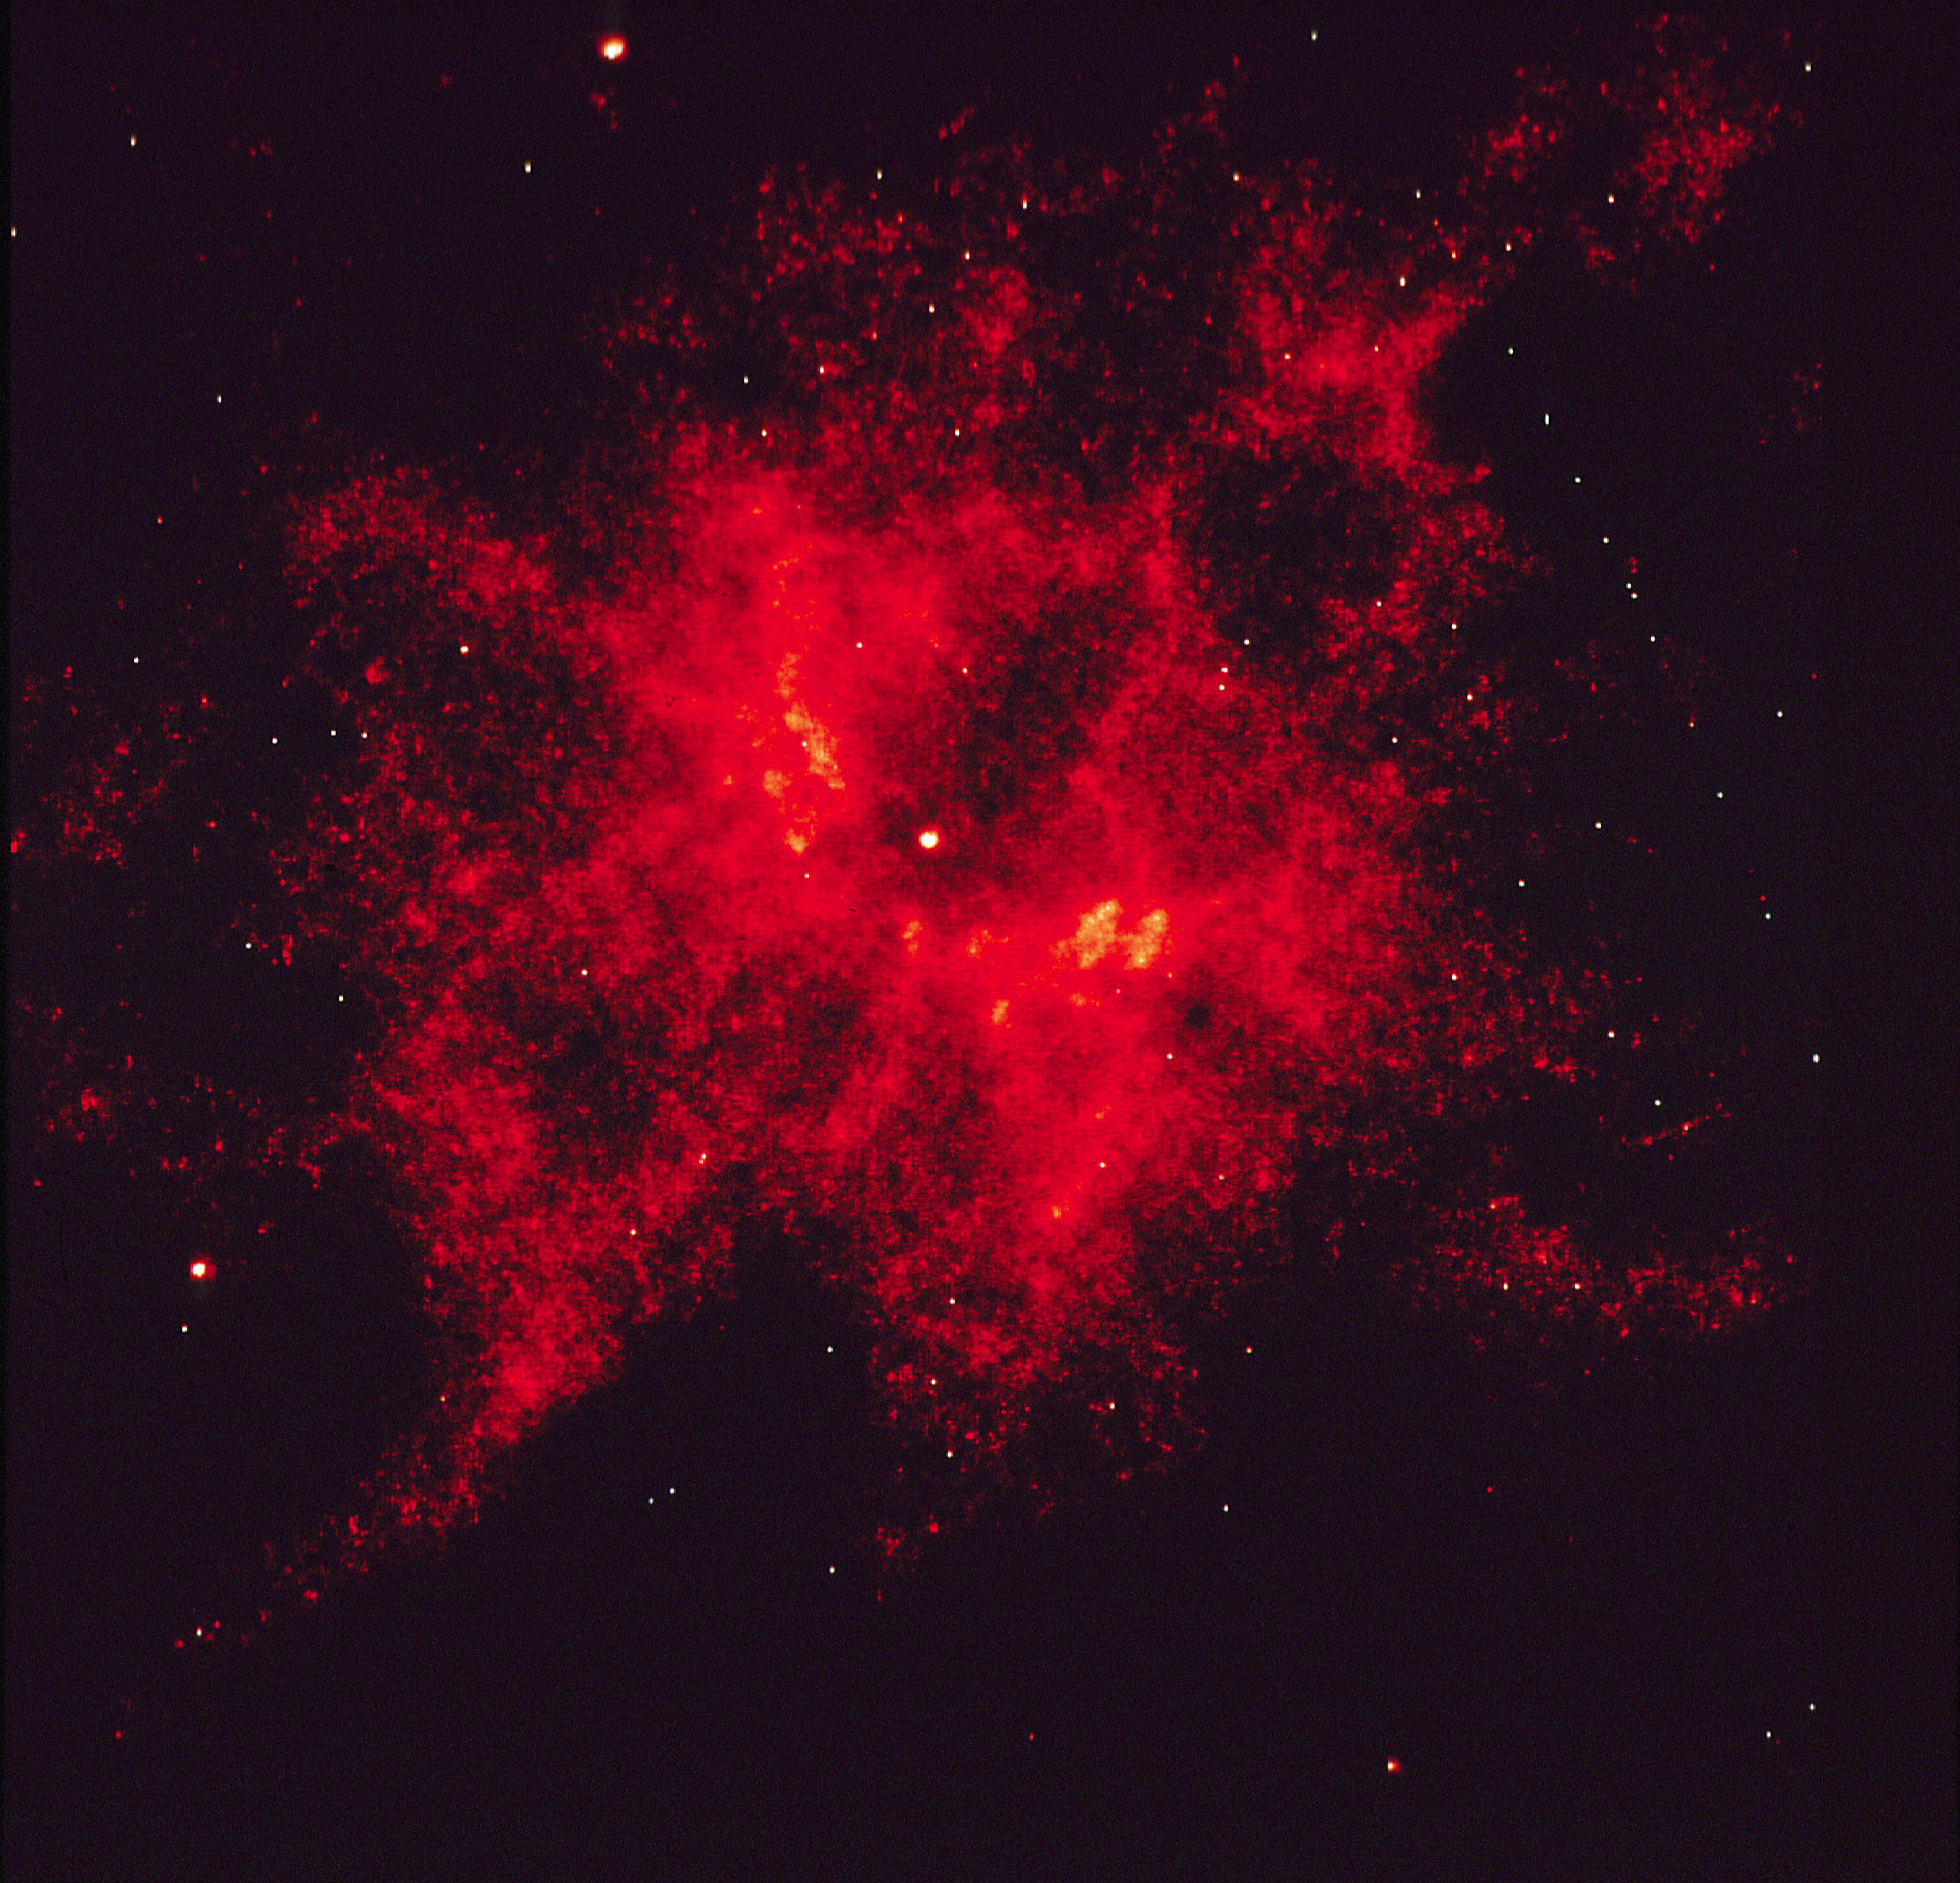

One of hottest known stars captured in Hubble photograph

This photograph from the NASA/ESA Hubble Space Telescope presents the first clear view of one of the hottest known stars, the central star of nebula NGC 2440 in our Milky Way galaxy. The superhot star, called "the NGC 2440 nucleus" is the bright white dot in the center of this photograph.

In previous photographs made with telescopes on the ground, blurring due to the Bath's atmosphere acted to smear together the light from the star with the glow of the surrounding nebula. By clearly separating the starlight from the nebular glow, astronomers have been able to make the most accurate estimate yet for the star temperature: a torrid 200,000 degrees Celsius (or 360,000 degree Fahrenheit) or more.

Credit: S. Heap, NASA/ESA/Goddard Space Flight Center